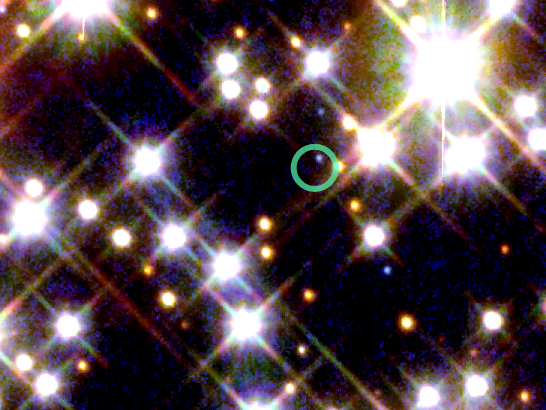

Detail from HST/WFPC2 with Location of Pulsar

The green circle in the image marks the location of a pulsar orbited by the oldest known planet.

Credit: NASA/ESA and H. Richer (University of British Columbia)